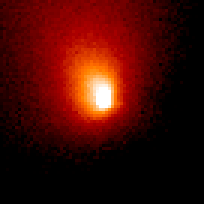

Comet Hale-Bopp

This is a series of Hubble Space Telescope observations of the region around the nucleus of Hale-Bopp, taken on eight different dates since September 1995. They chronicle changes in the evolution of the nucleus as it moves ever closer to, and is warmed by, the sun.

Credit: Harold Weaver (Johns Hopkins University) and NASA/ESA